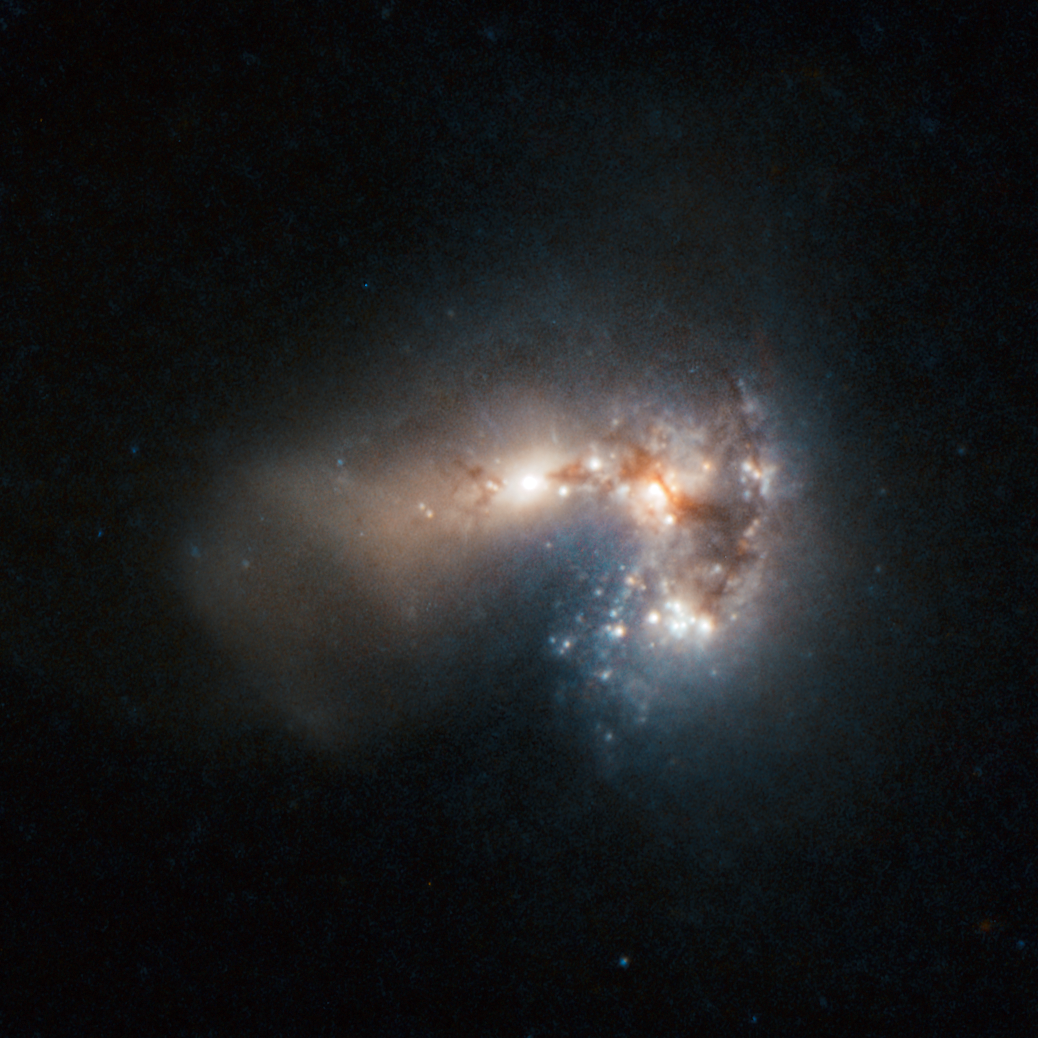

Frenzied star birth in Haro 11

Haro 11 appears to shine gently amid clouds of gas and dust, but this placid facade belies the monumental rate of star formation occurring in this “starburst” galaxy. By combining data from the NASA/ESA Hubble Space Telescope and ESO’s Very Large Telescope, astronomers have created a new image of this incredibly bright and distant galaxy. The team of astronomers from Stockholm University, Sweden, and the Geneva Observatory, Switzerland, have identified 200 separate clusters of very young, massive stars. Most of these are less than 10 million years old. Many of the clusters are so bright in infrared light that astronomers suspect that the stars are still emerging from the cloudy cocoons where they were born. The observations have led the astronomers to conclude that Haro 11 is most likely the result of a merger between a galaxy rich in stars and a younger, gas-rich galaxy. Haro 11 is found to produce stars at a frantic rate, converting about 20 solar masses of gas into stars every year.

Haro galaxies, first discovered by the noted astronomer Guillermo Haro in 1956, are defined by unusually intense blue and violet light. Usually this high energy radiation comes from the presence of many newborn stars or an active galactic nucleus. Haro 11 is about 300 million light-years away and is the second closest of such starburst galaxies.

The paper describing this result (“Super star clusters in Haro 11: Properties of a very young starburst and evidence for a near-infrared flux excess”, by A. Adamo et al.) is available at http://adsabs.harvard.edu/doi/10.1111/j.1365-2966.2010.16983.x

Credit: ESA/Hubble/ESO and NASA